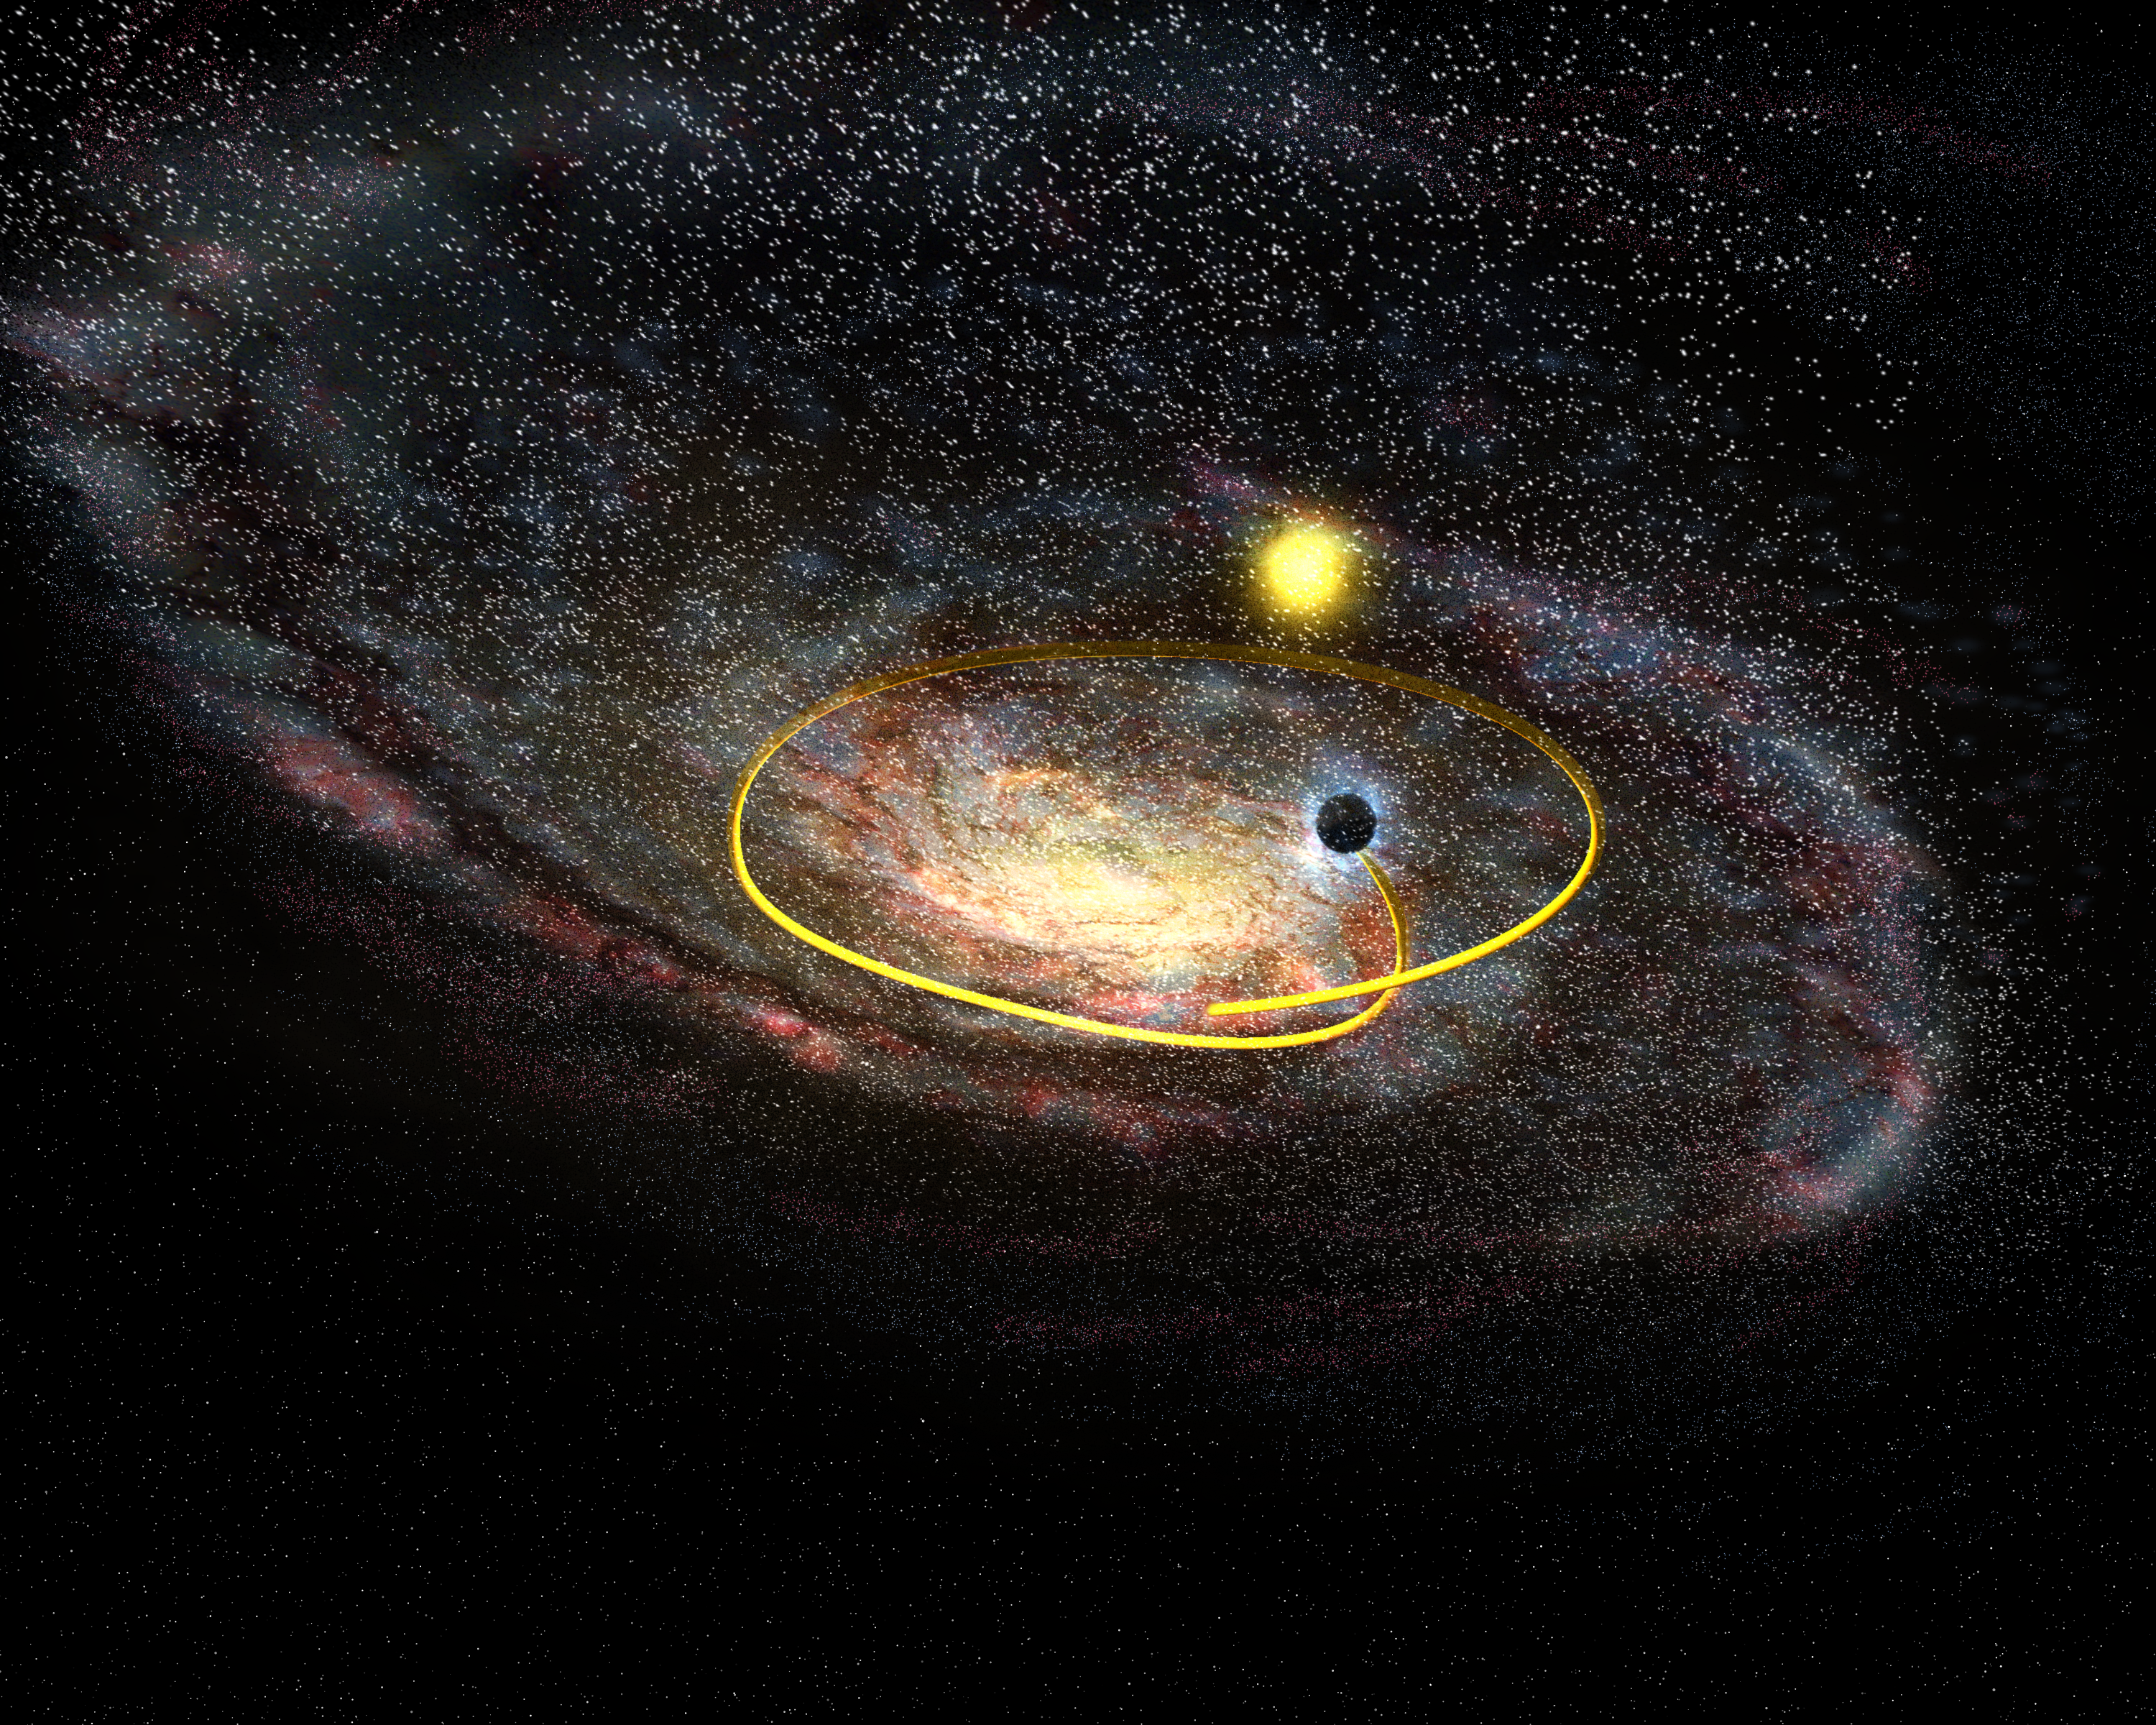

Black hole hurtling across the plane of the Milky Way

Artist's impression shows an oblique view of our Milky Way galaxy. The black-hole system GRO J1655-40 is streaking through space at a rate of 400 000 kilometres per hour - 4 times faster than the average velocity of the stars in the galactic neighbourhood. The yellow star is our Sun.

Credit: European Space Agency, NASA and Felix Mirabel (the French Atomic Energy Commission & the Institute for Astronomy and Space Physics/Conicet of Argentina)